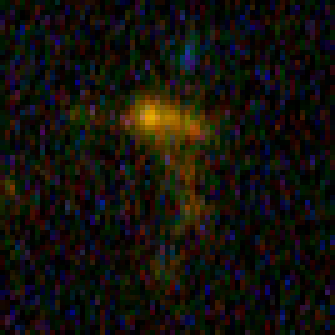

Hubble Building Blocks Galaxy at Redshift 4.90

Building block galaxy at redshift of 4.90 from Hubble Ultra Deep Field image.

Credit: NASA, ESA, and N. Pirzkal (European Space Agency/STScI)